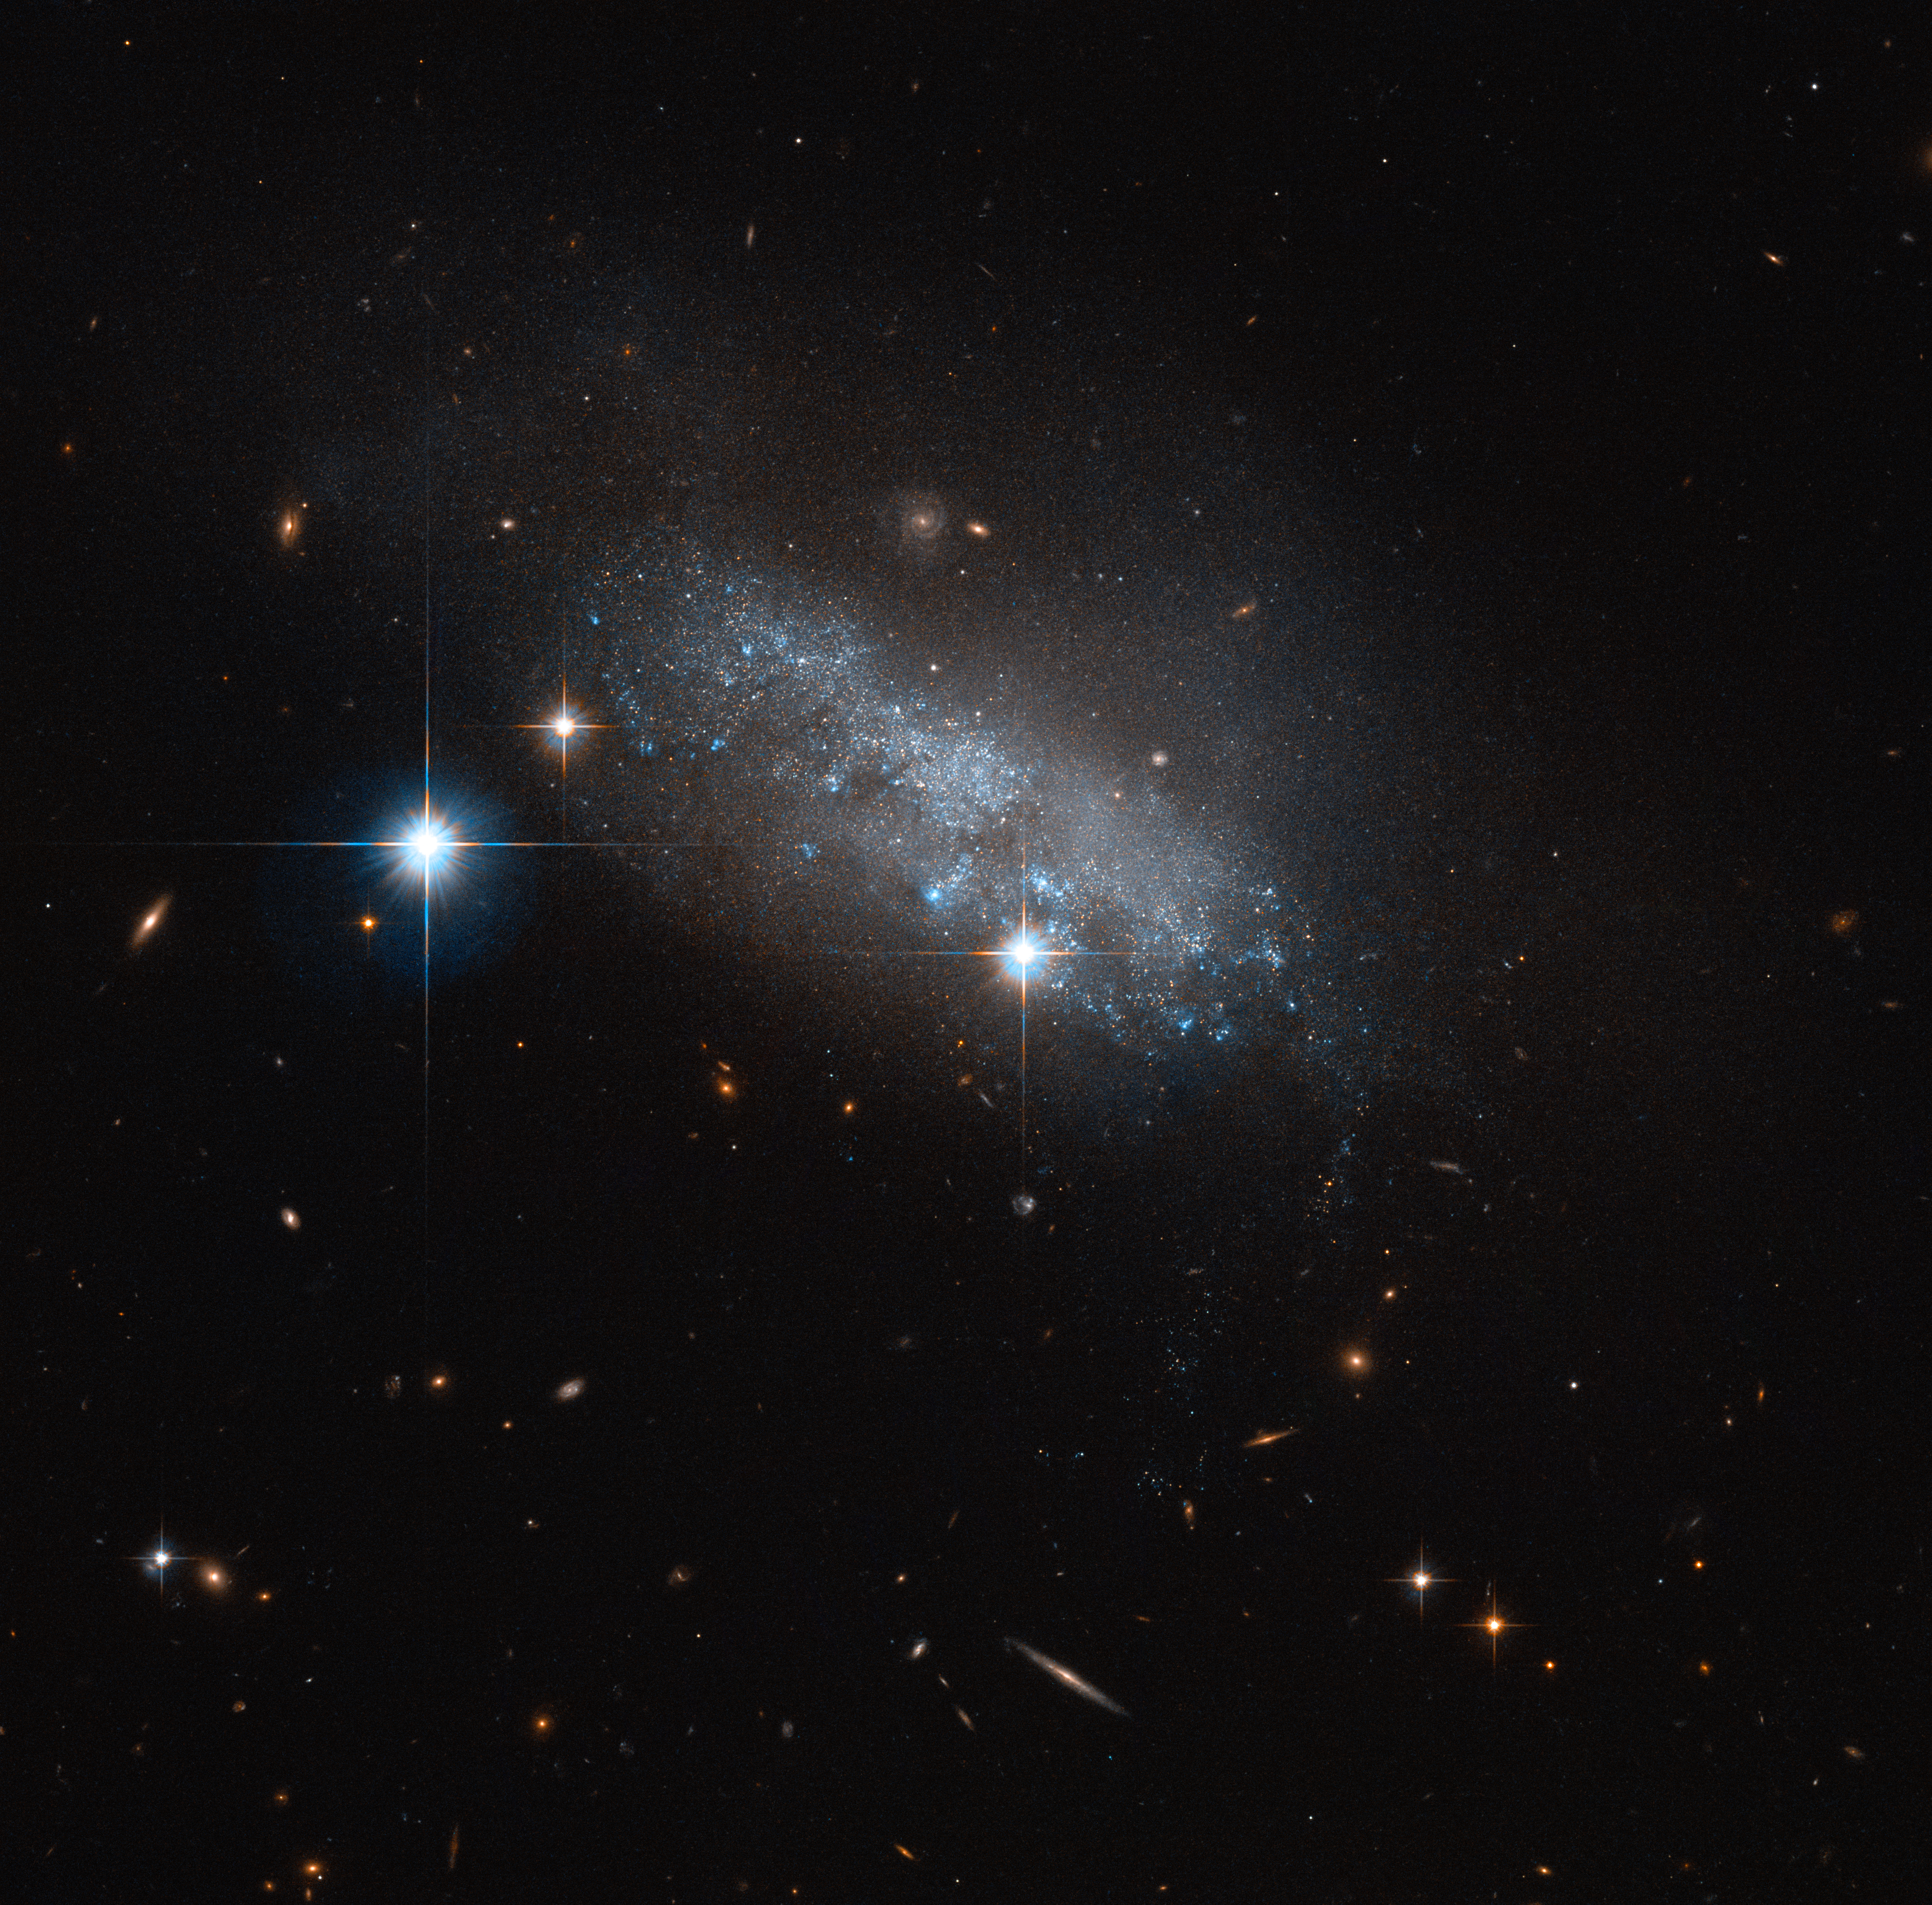

Spotlight on IC 3583

This delicate blue group of stars — actually an irregular galaxy named IC 3583 — sits some 30 million light-years away in the constellation of Virgo (The Virgin).

It may seem to have no discernable structure, but IC 3583 has been found to have a bar of stars running through its centre. These structures are common throughout the Universe, and are found within the majority of spiral, many irregular, and some lenticular galaxies. Two of our closest cosmic neighbours, the Large and Small Magellanic Clouds, are barred, indicating that they may have once been barred spiral galaxies that were disrupted or torn apart by the gravitational pull of the Milky Way.

Something similar might be happening with IC 3583. This small galaxy is thought to be gravitationally interacting with one of its neighbours, the spiral Messier 90. Together, the duo form a pairing known as Arp 76. It’s still unclear whether these flirtations are the cause of IC 3583’s irregular appearance — but whatever the cause, the galaxy makes for a strikingly delicate sight in this NASA/ESA Hubble Space Telescope image, glimmering in the blackness of space.

Credit: ESA/Hubble & NASA